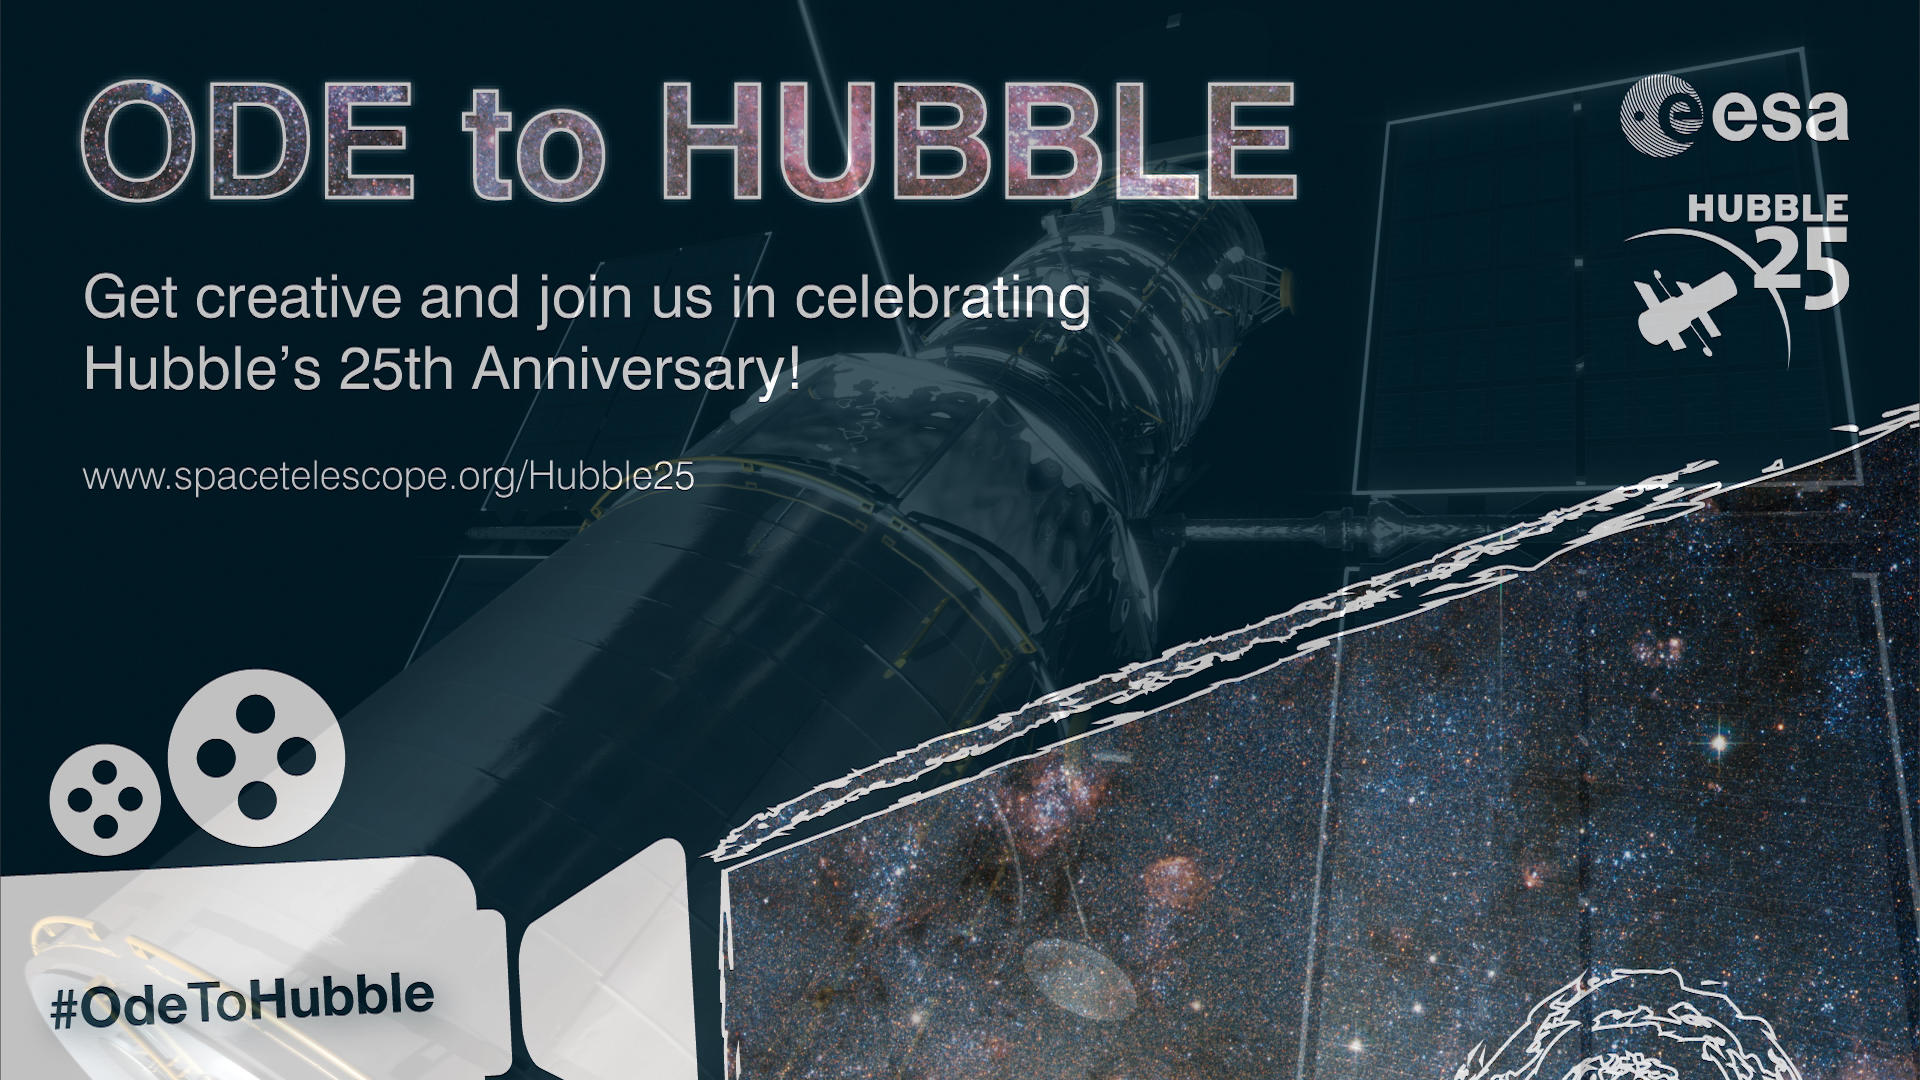

Screenshot from Hubblecast 81: Ode to Hubble

A screenshot from Hubblecast 81: Ode to Hubble.

More information on the 25th anniversary can be found on the dedicated web pages.

Credit: NASA & ESA